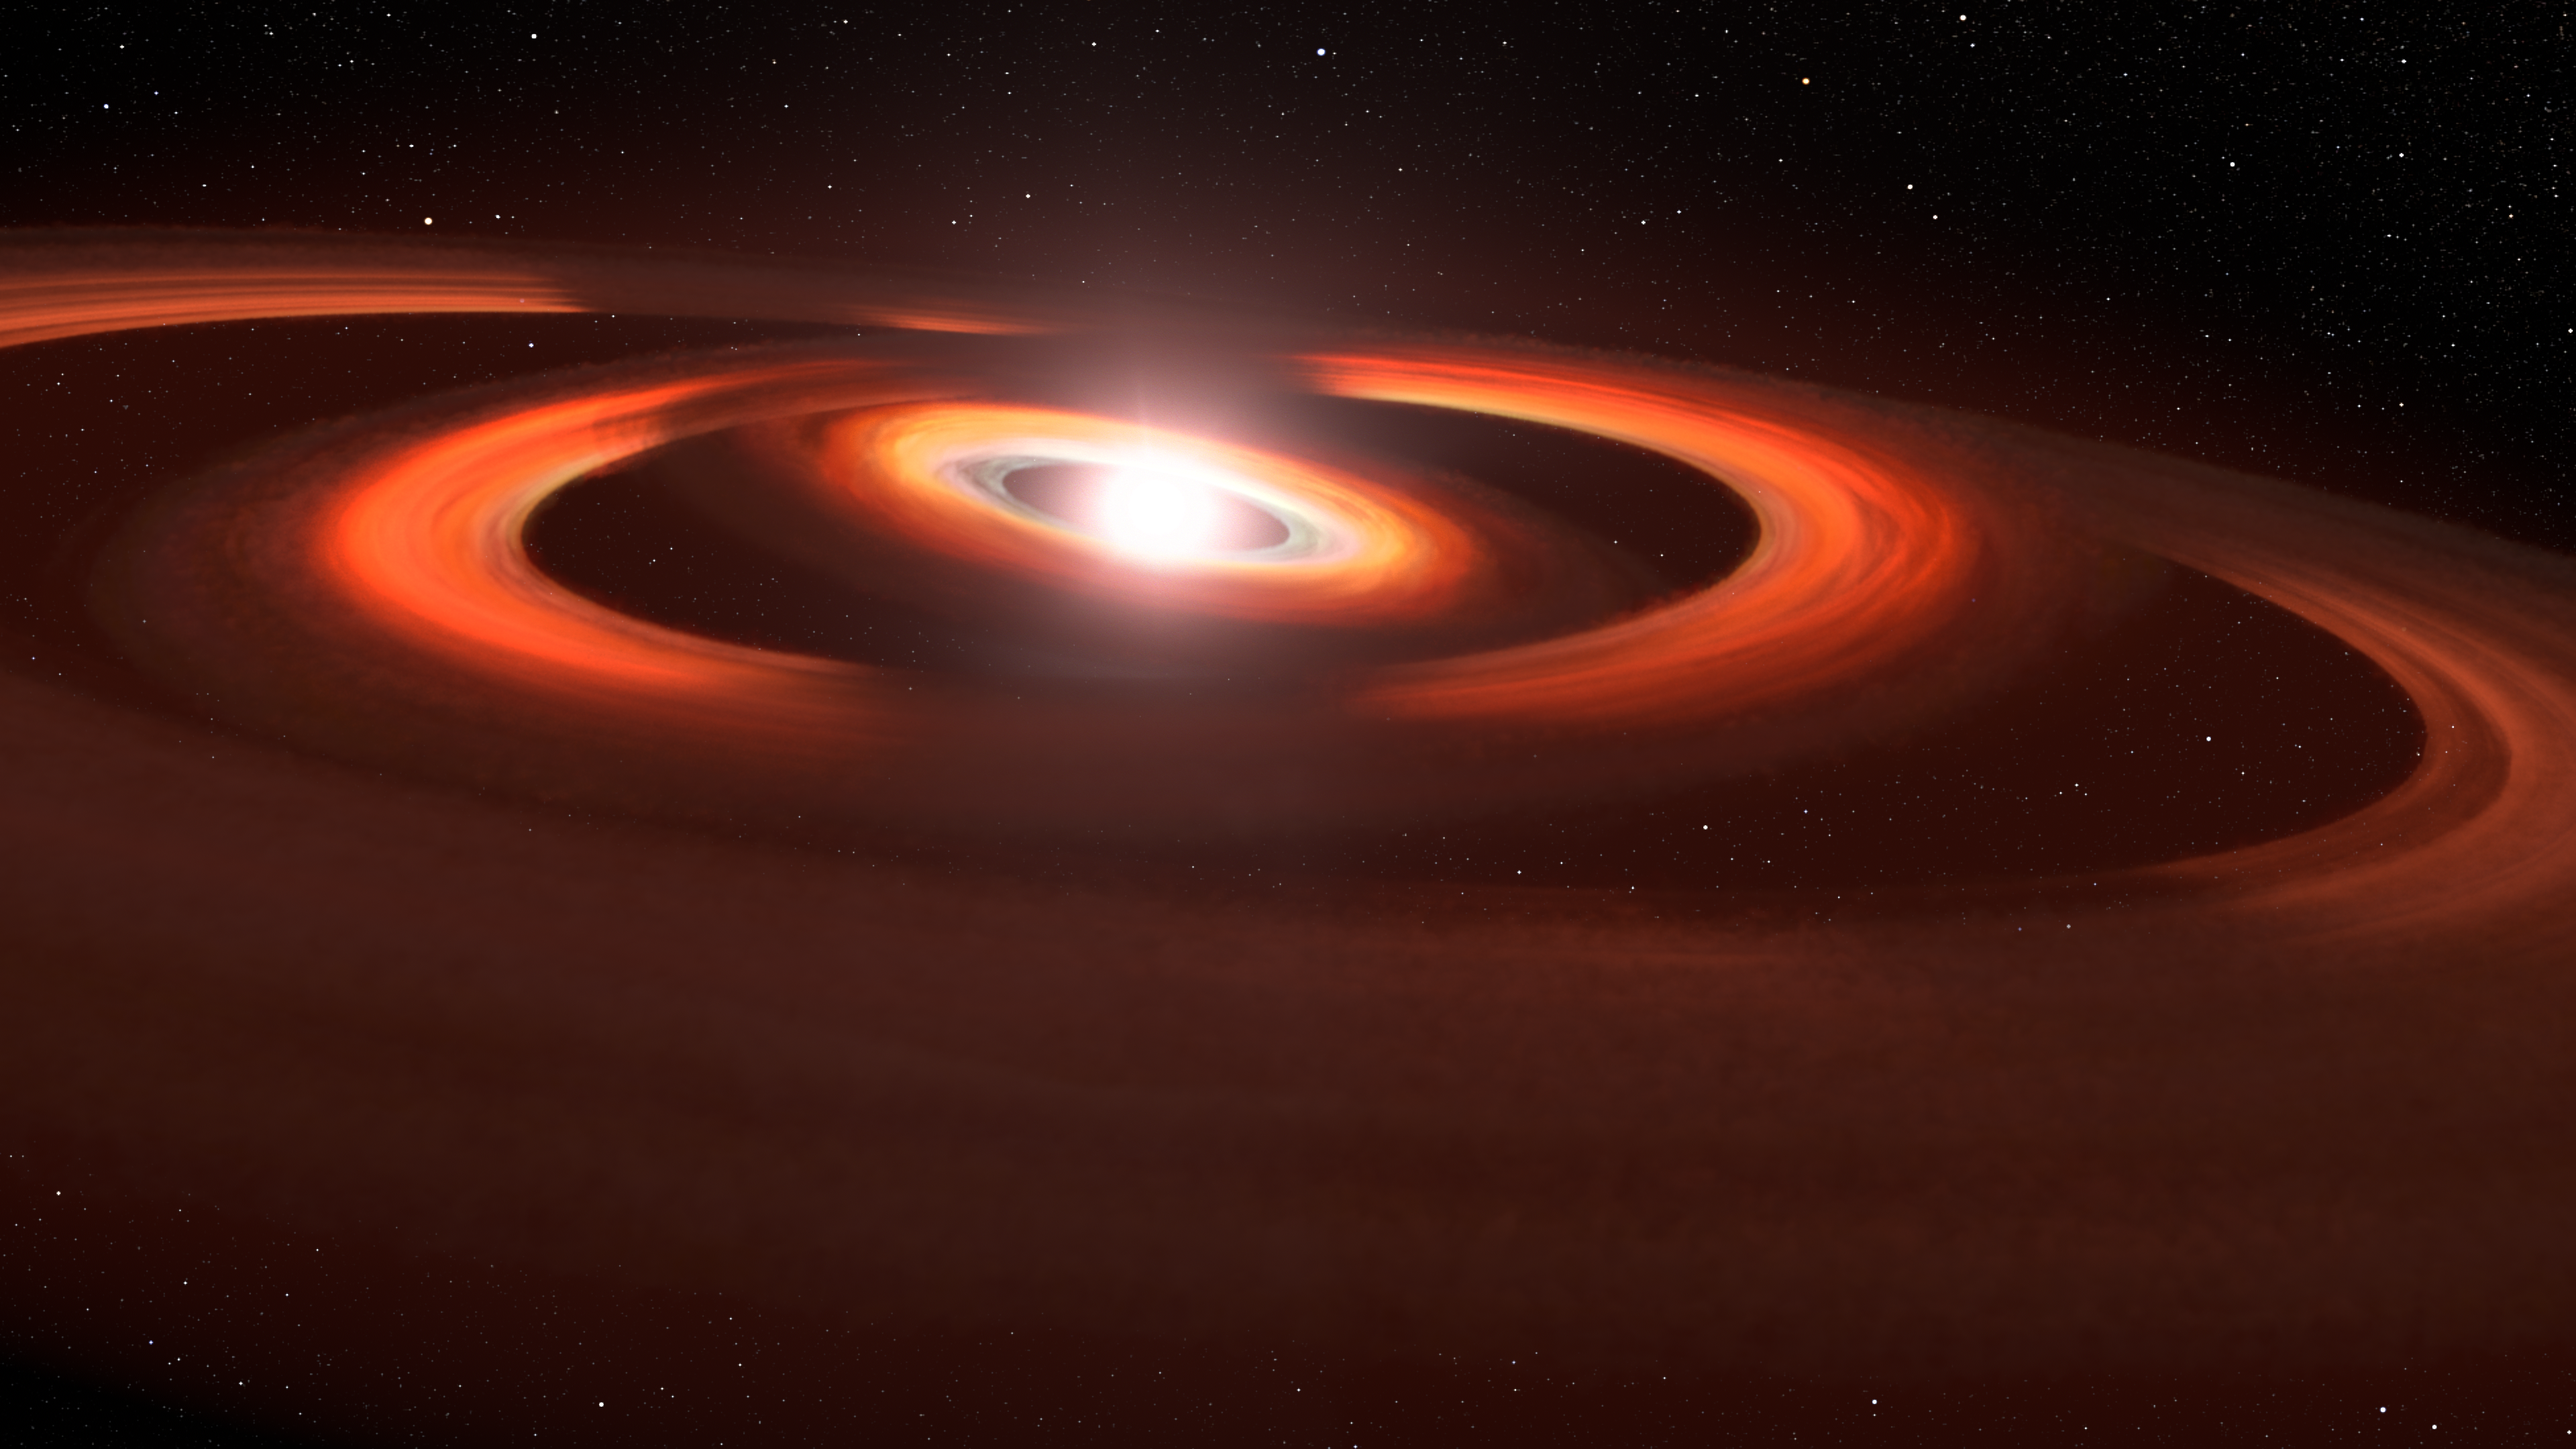

Concentric gas and dust discs around the star TW Hydrae

This illustration is based on NASA/ESA Hubble Space Telescope images of a gas and dust discs encircling the young star TW Hydrae. Hubble photos show shadows sweeping across the discs encircling the system. The interpretation is that these shadows are from slightly inclined inner discs that block starlight from reaching the outer disc, and therefore cast a shadow. The discs are slightly inclined to each other because of the gravitational pull of unseen planets warping the disc structure.

Credit: NASA. ESA, L. Hustak (STScI)